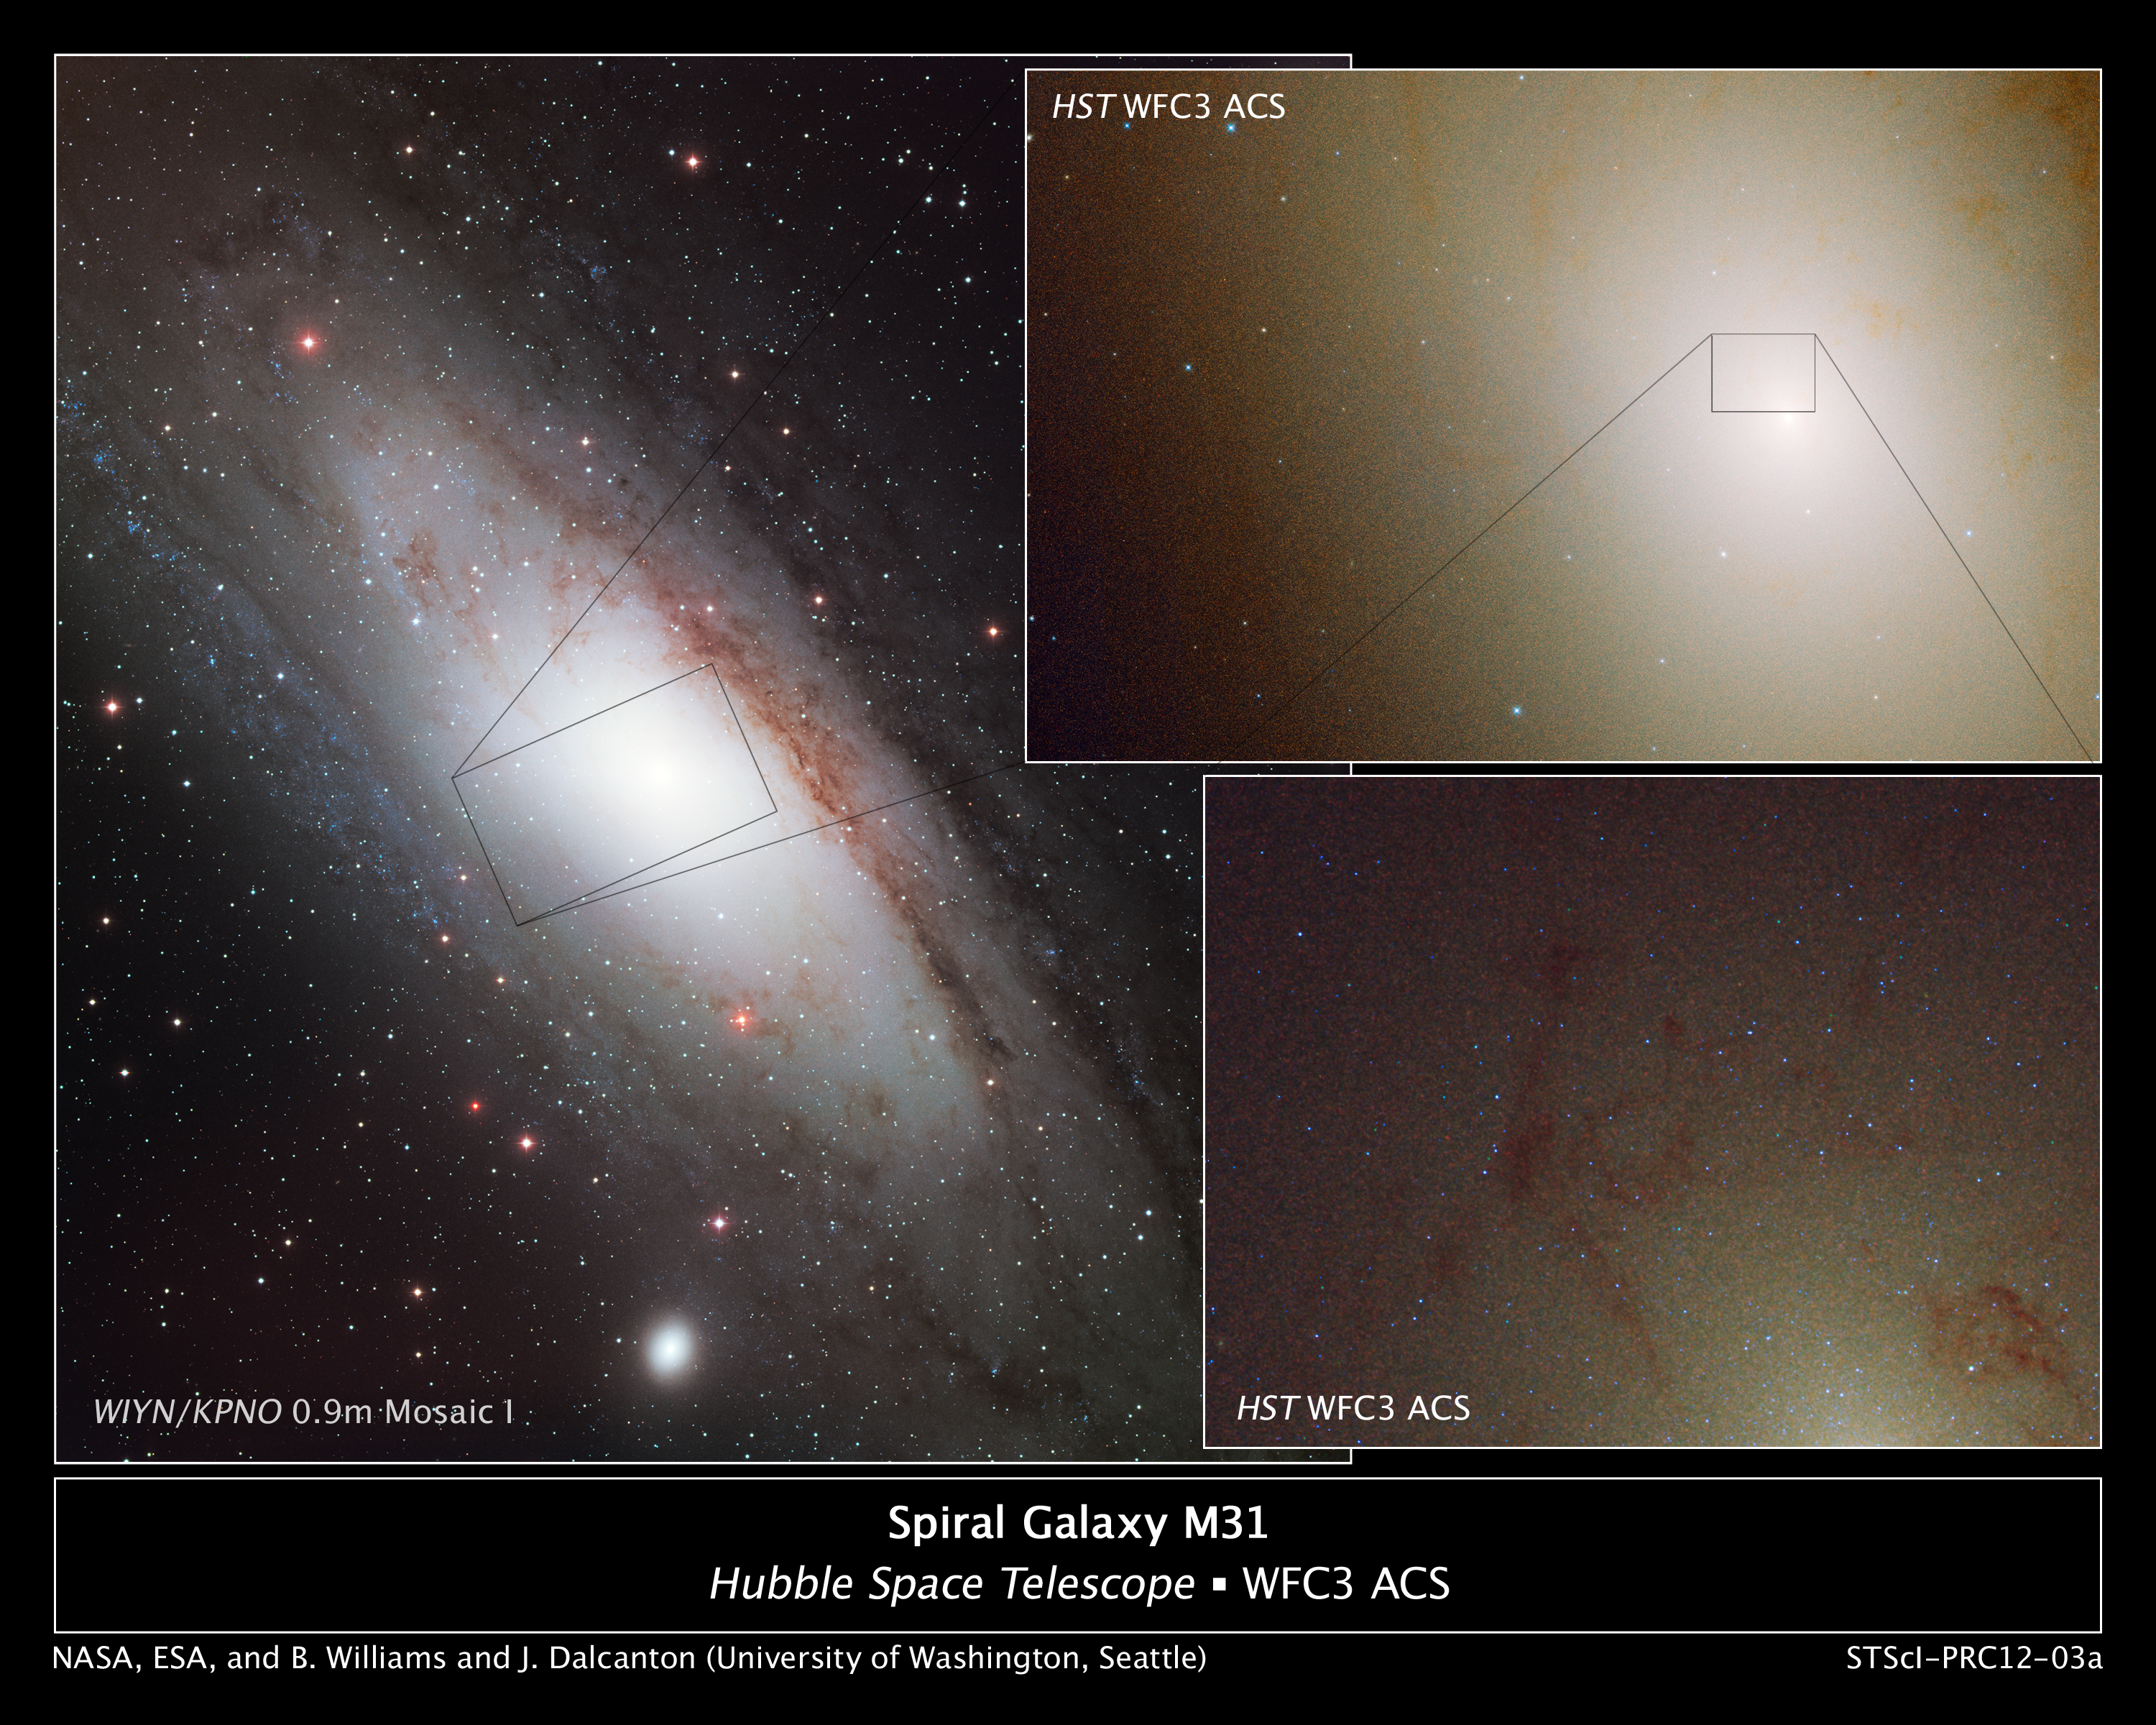

Hubble observes blue stars in Andromeda's core

The image at left shows the nearby, majestic Andromeda galaxy. The rectangular box marks the region probed by NASA's Hubble Space Telescope.

Hubble's view, taken with the Wide Field Camera 3 and the Advanced Camera for Surveys, is shown in the images on the right. The images are a blend of visible and ultraviolet light. The photo at top right is 7,900 light-years across and reveals the galaxy's crowded central region. The bright area near the center of the image is a grouping of stars nestled around the galaxy's black hole. The blue dots sprinkled throughout the image are ultra-blue stars whose population increases around the crowded hub. The blue stars are old Sun-like stars that have prematurely cast off their outer layers of material, exposing their extremely blue-hot cores. The square box outlines a close-up view of an area around the core.

The detailed image, shown at bottom right, reveals a richer population of blue stars huddled around the core. Dark dust clouds also are visible. The image is 740 light-years wide.

The right-hand images, taken with Hubble, are part of a census of stars in M31 called the Panchromatic Hubble Andromeda Treasury survey.

The image of the Andromeda galaxy was taken on 13 June 2001, with the WIYN/KPNO 0.9-meter Mosaic I by T. Rector and B. Wolpa of the National Optical Astronomy Observatory in Tucson, Arizona (USA).

Credit: NASA, ESA, B.F. Williams (University of Washington, Seattle), D. Lang (Princeton University, N.J.), J. Kalirai (Space Telescope Science Institute, Baltimore), and J. Dalcanton (University of Washington, Seattle)